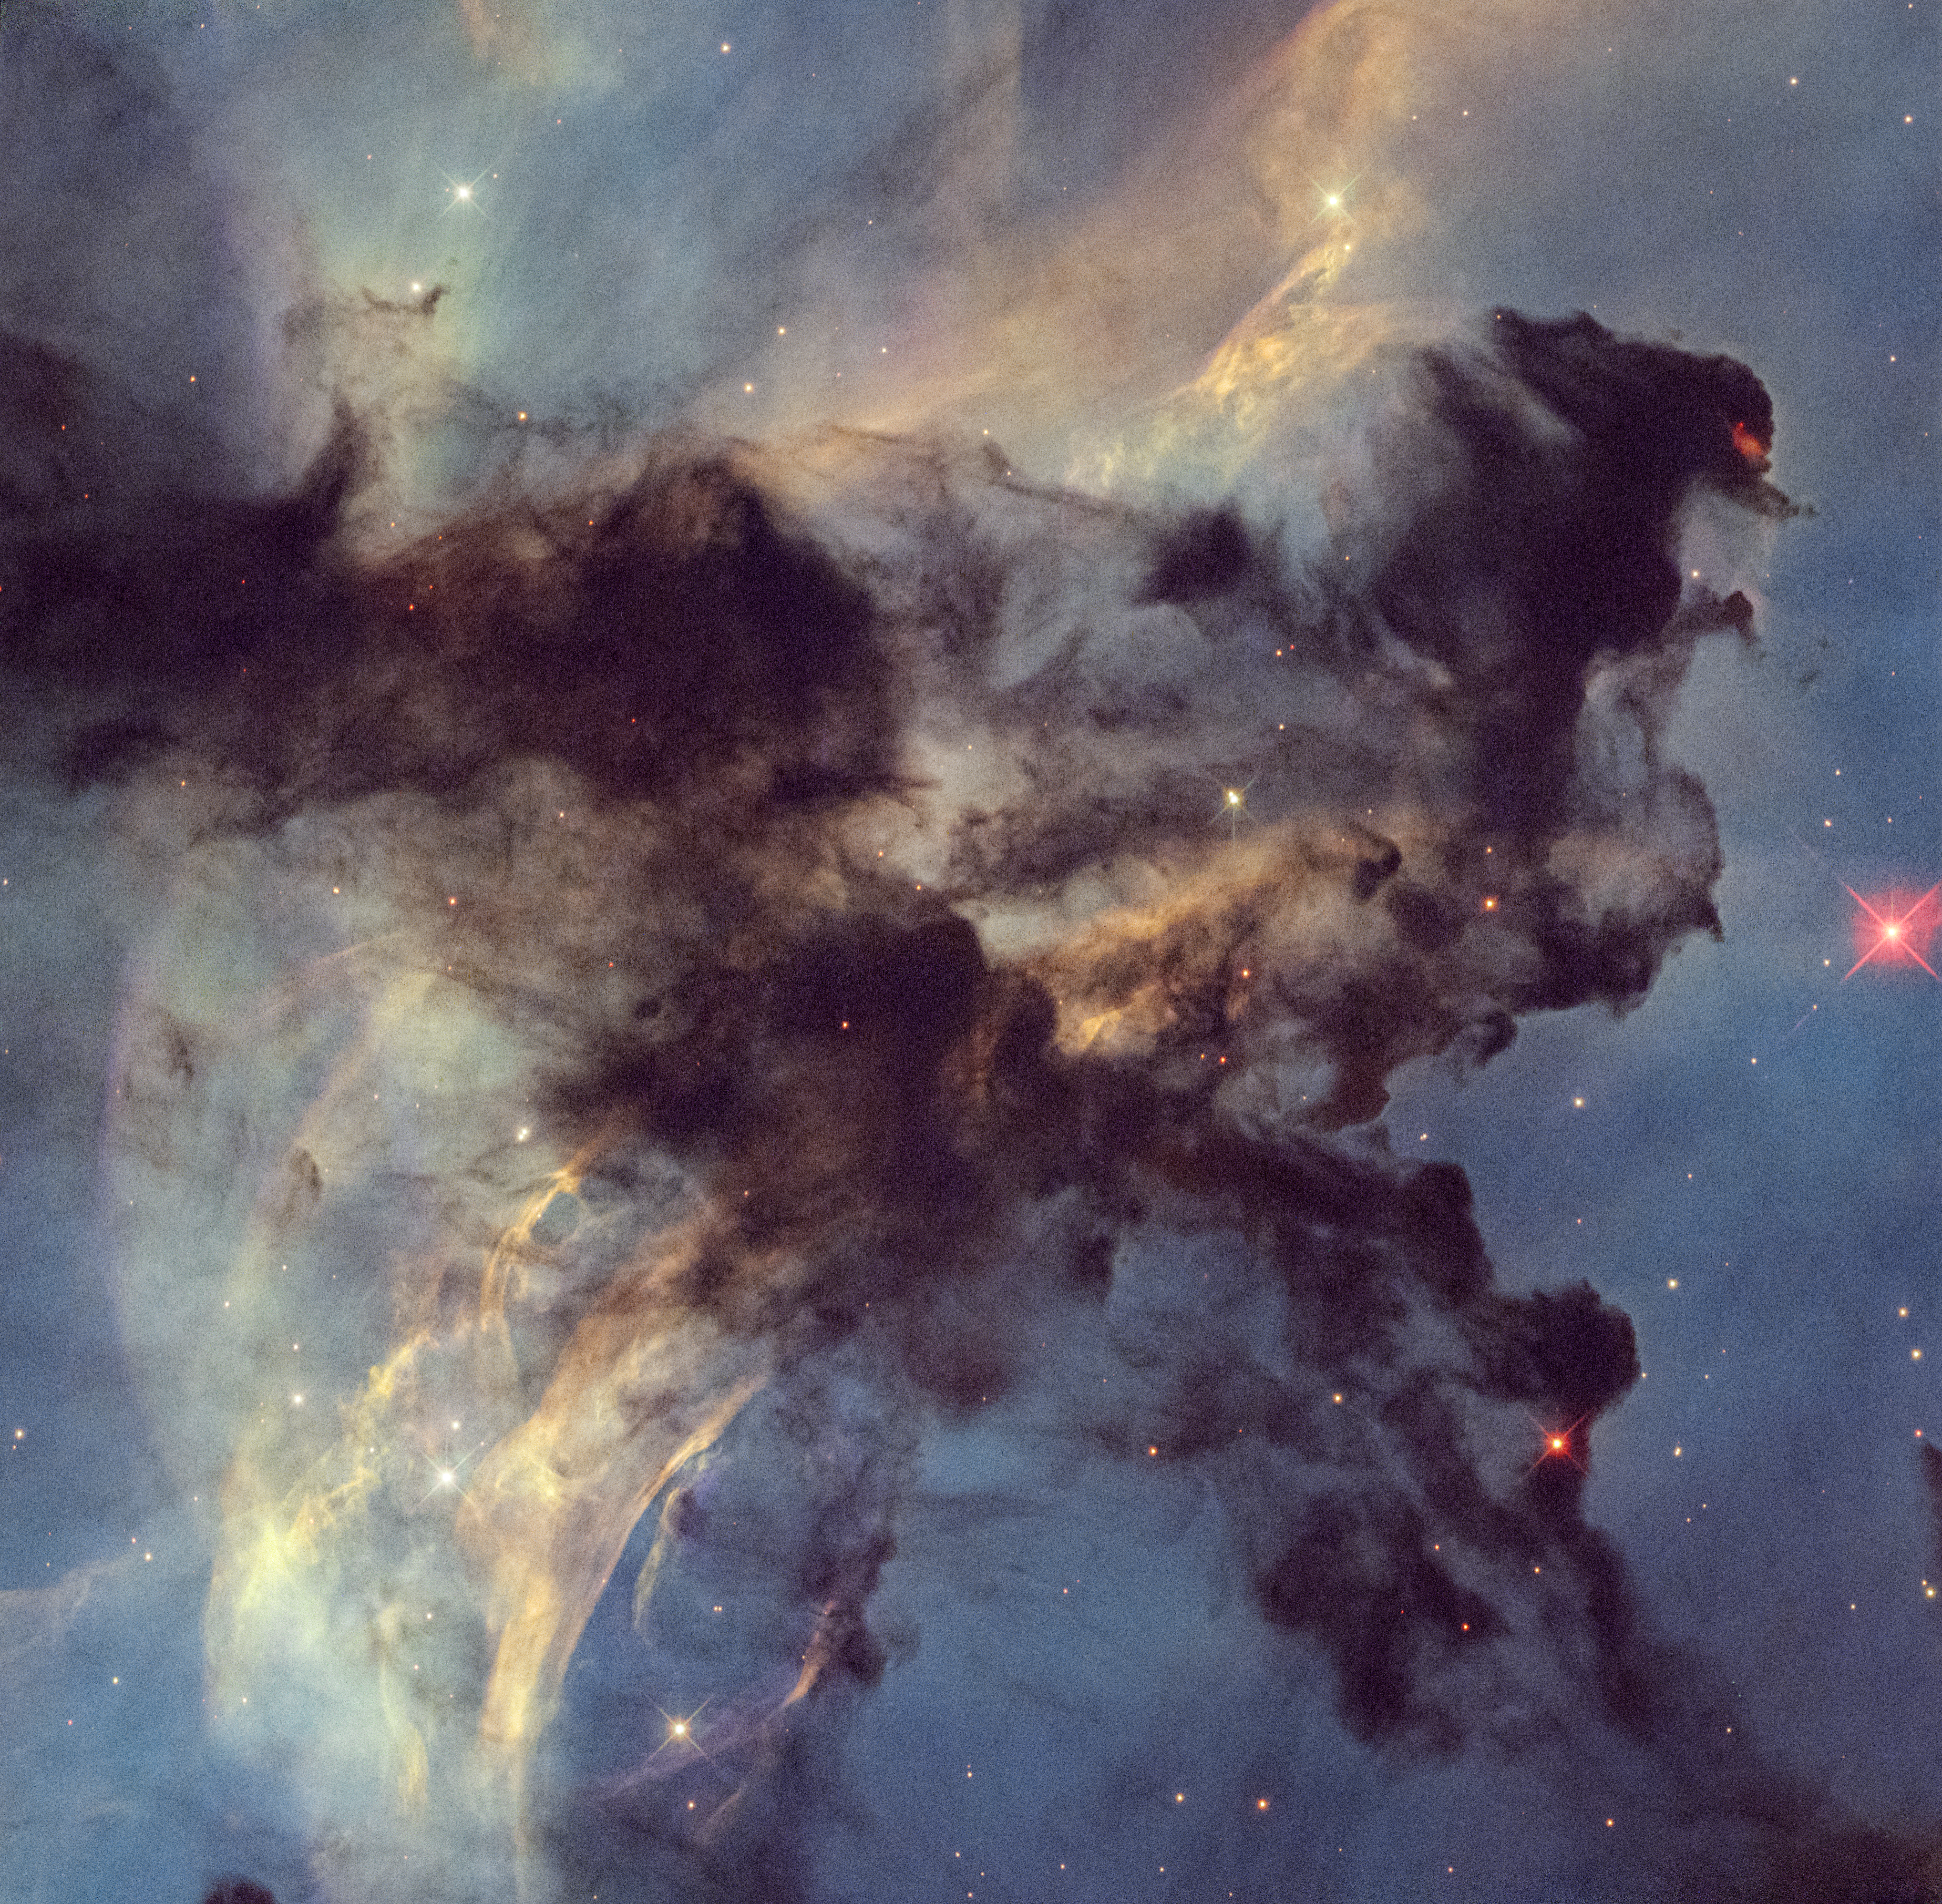

Rosette Nebula

This is a Hubble Space Telescope photo of a small portion of the Rosette Nebula, a huge star-forming region spanning 100 light-years across and located 5,200 light-years away. Hubble zooms into a small portion of the nebula that is only 4 light-years across (the approximate distance between our Sun and the neighbouring Alpha Centauri star system.) Dark clouds of hydrogen gas laced with dust are silhouetted across the image. The clouds are being eroded and shaped by the seething radiation from the cluster of larger stars in the center of the nebula (NGC 2440). An embedded star seen at the tip of a dark cloud in the upper right portion of the image is launching jets of plasma that are crashing into the cold cloud around it. The resulting shock wave is causing a red glow. The colours come from the presence of hydrogen, oxygen, and nitrogen.

Credit: NASA, ESA, STScI